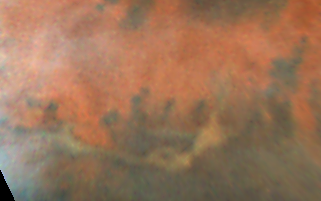

Mars Pathfinder Landing Site

Hubble Space Telescope images of Mars, taken on June 27, 1997, reveal a significant dust storm which fills much of the Valles Marineris canyon system and extends into Xanthe Terra, about 600 miles (1000 kilometers) south of the landing site.

Credit: Steve Lee (University of Colorado), Mike Wolff and Phil James (University of Toledo) and NASA/ESA